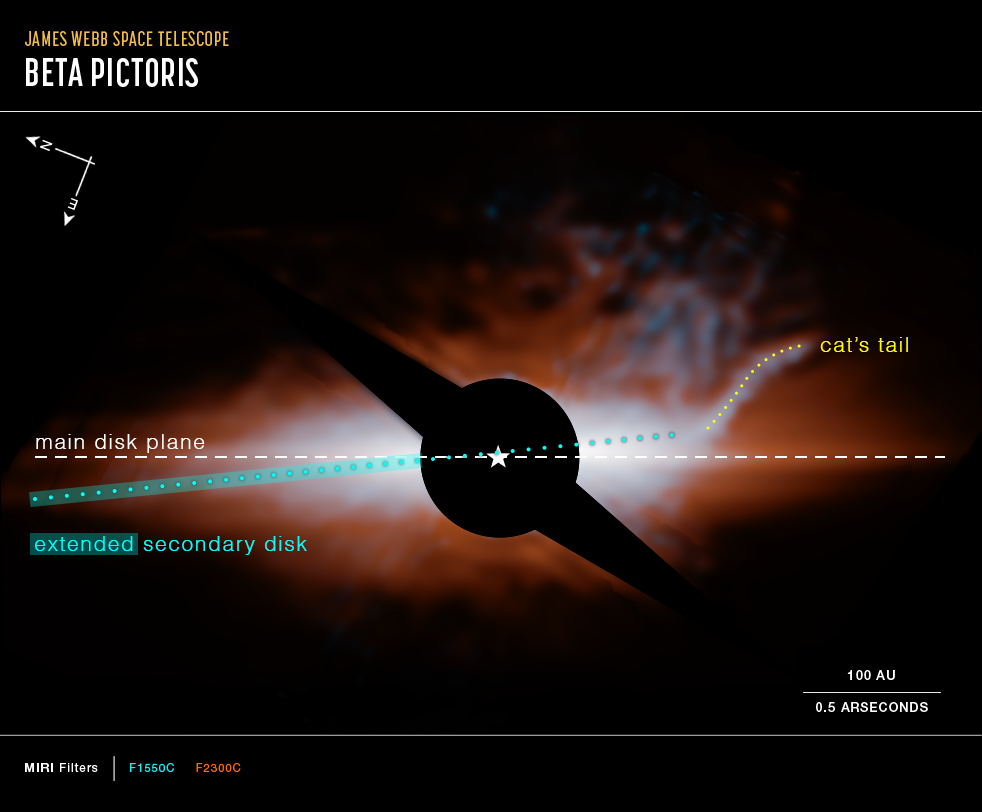

Star system Beta Pictoris (MIRI image, compass image)

This image from Webb’s MIRI (Mid-Infrared Instrument) shows the star system Beta Pictoris. An edge-on disc of dusty debris generated by collisions between planetesimals (orange) dominates the view. A hotter, secondary disc (cyan) is inclined by about 5 degrees relative to the primary disc. The curved feature at upper right, which the science team nicknamed the “cat’s tail,” has never been seen before. A coronagraph (black circle and bar) has been used to block the light of the central star, whose location is marked with a white star shape. In this image light at 15.5 microns is coloured cyan and 23 microns is orange (filters F1550C and F2300C, respectively).

Credit: NASA, ESA, CSA, STScI, C. Stark and K. Lawson (NASA GSFC), J. Kammerer (ESO), and M. Perrin (STScI).